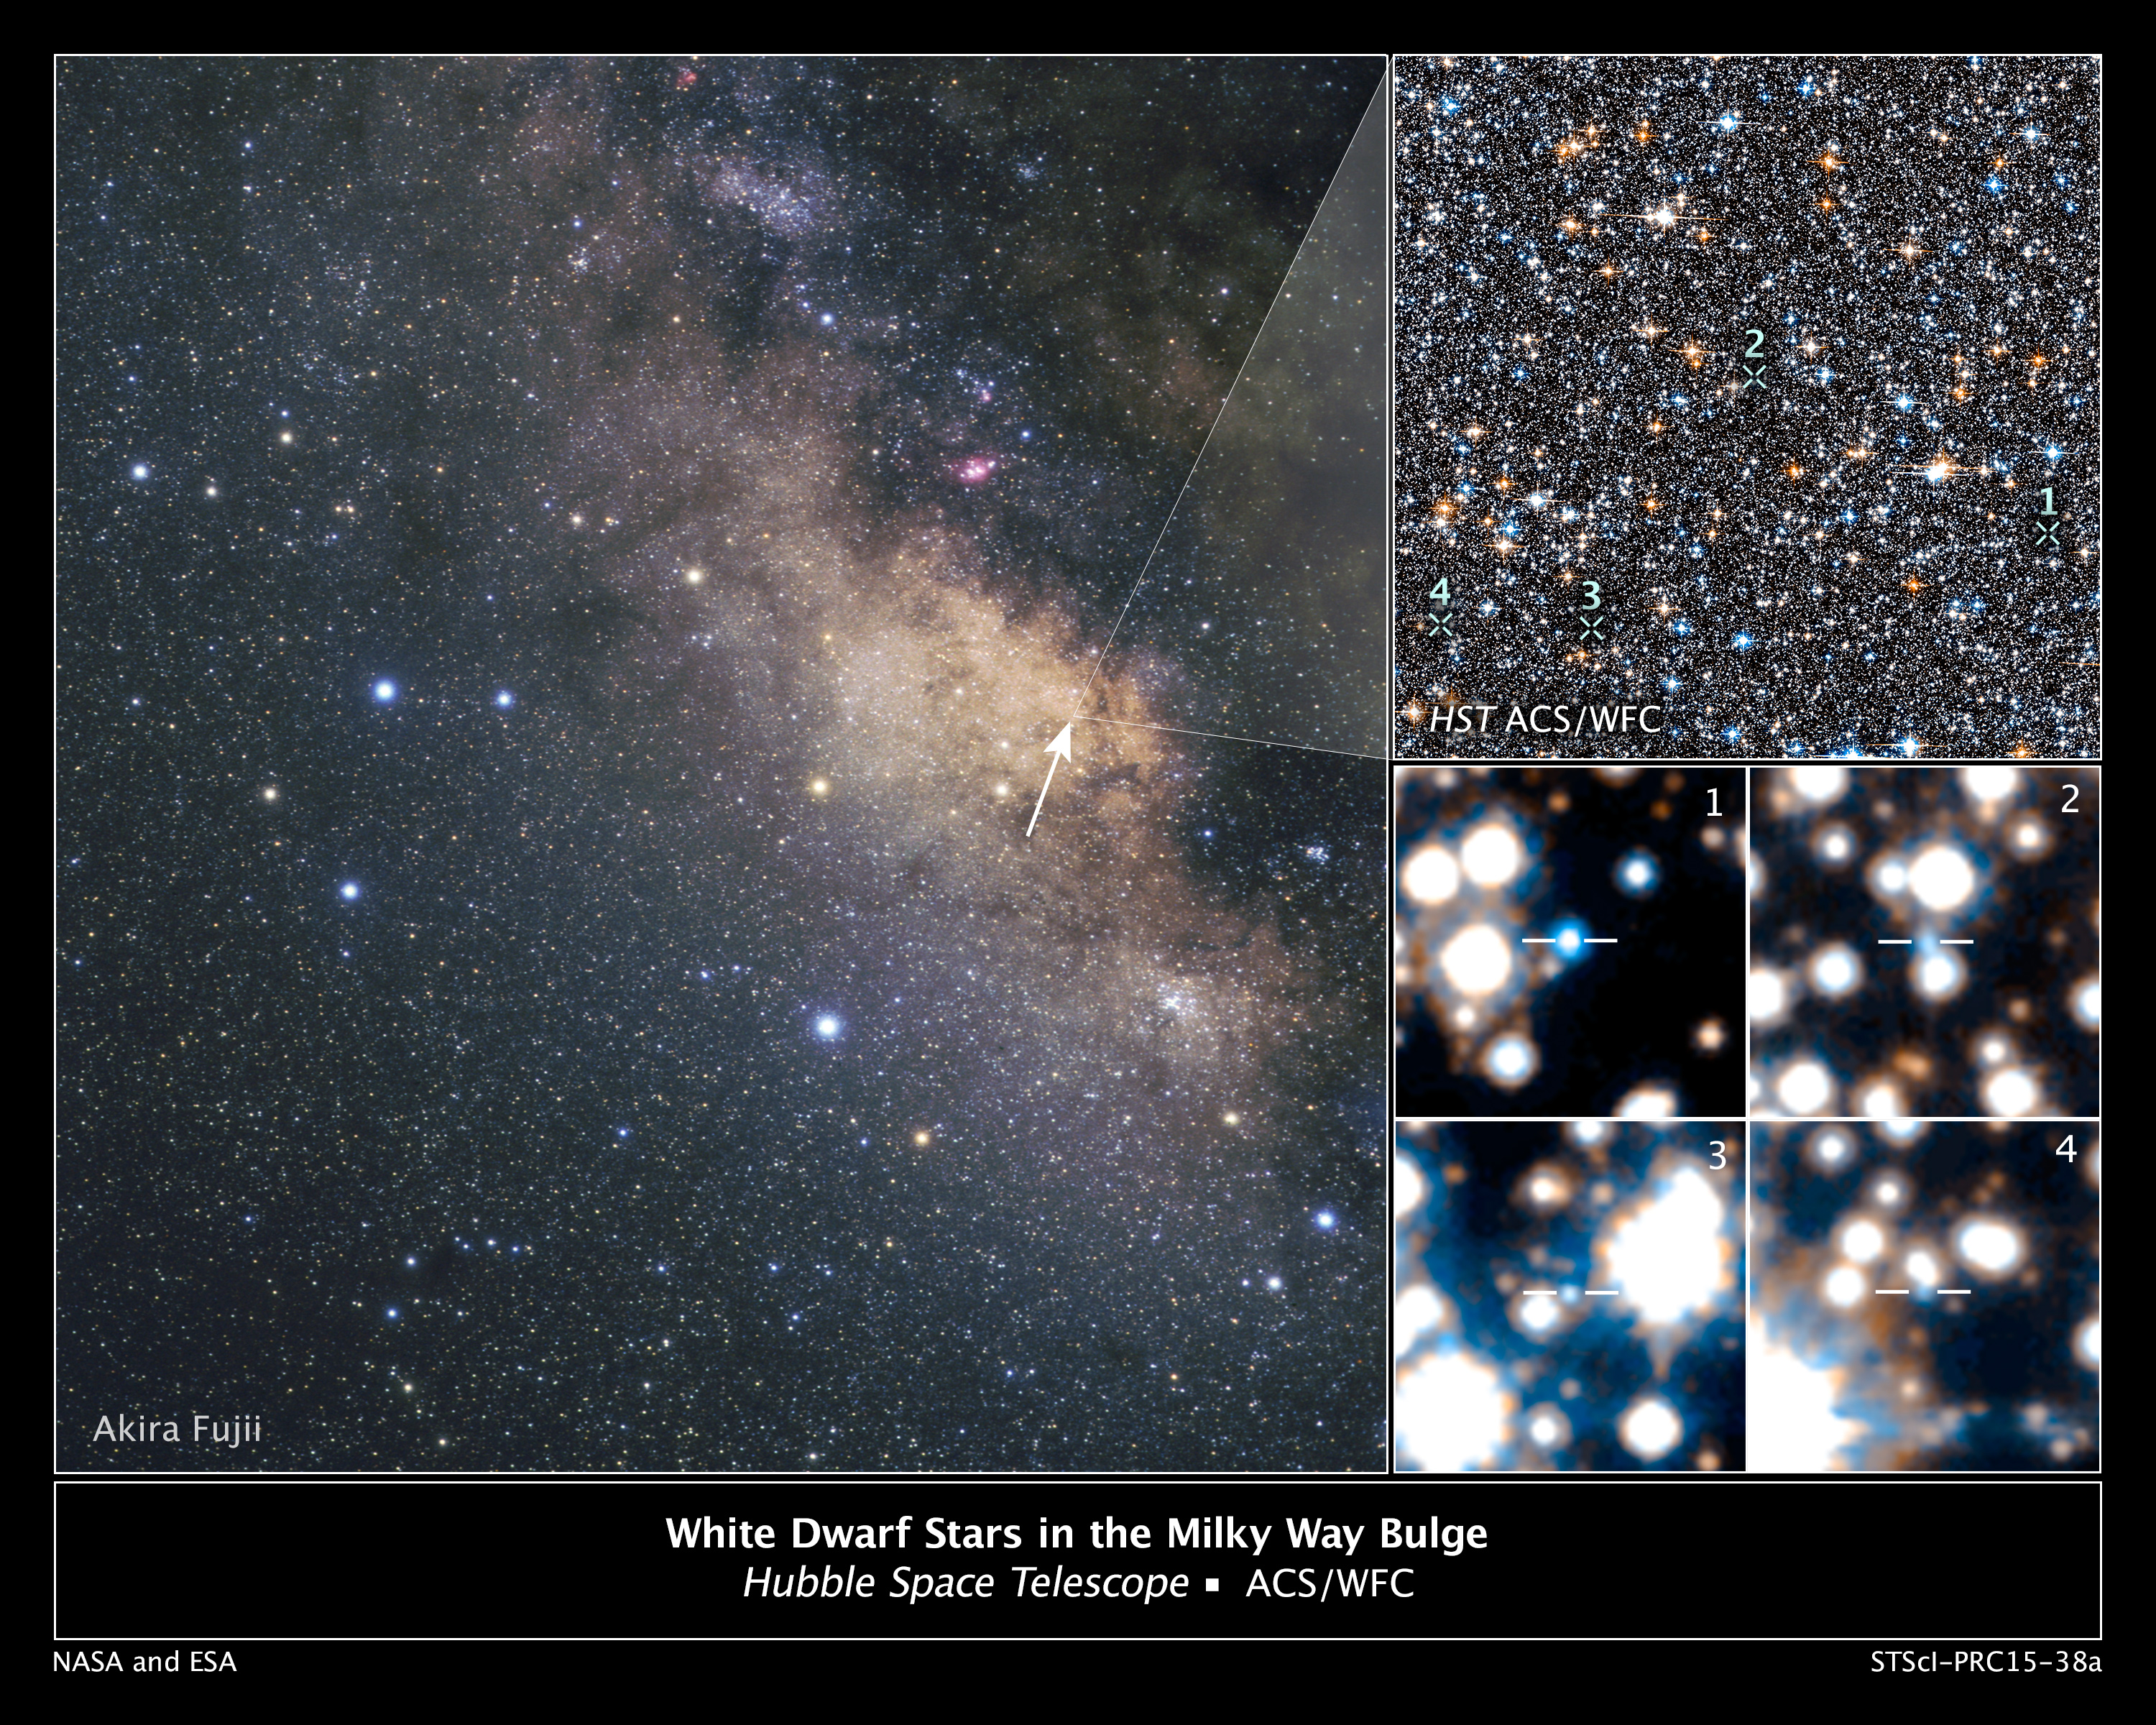

Hubble Spots White Dwarfs in Milky Way's Central Hub

The NASA/ESA Hubble Space Telescope has detected for the first time a population of white dwarfs embedded in the hub of our Milky Way galaxy. The Hubble images are the deepest, most detailed study of the galaxy's central bulge of stars. The smoldering remnants of once-vibrant stars can yield clues to our galaxy's early construction stages that happened long before Earth and our sun formed.

[Left] - This is a view of the Milky Way's central bulge, seen in the direction of the constellation Sagittarius. Giant dust clouds along this line block most of the starlight coming from the galactic center. Hubble, however, peered through a region (marked by the arrow) called the Sagittarius Window, which offers a keyhole view into the galaxy's hub.

[Upper right] - This is a small section of Hubble's view of the dense collection of stars crammed together in the galactic bulge. The region surveyed is part of the Sagittarius Window Eclipsing Extrasolar Planet Search (SWEEPS) field and is located 26,000 light-years away.

[Lower right] - Hubble uncovered extremely faint and hot white dwarfs. This is a sample of 4 out of the 70 brightest white dwarfs spied by Hubble in the Milky Way's bulge. Astronomers picked them out based on their faintness, blue-white color, and motion relative to our sun. The numbers in the inset images correspond to the white dwarfs' location in the larger Hubble view. Hubble's Advanced Camera for Surveys made the observations in 2004 and 2011-2013.

Credit for Hubble Images: NASA, ESA, A. Calamida and K. Sahu (STScI), and the SWEEPS Science Team Credit for Ground-based Image: A. Fujii